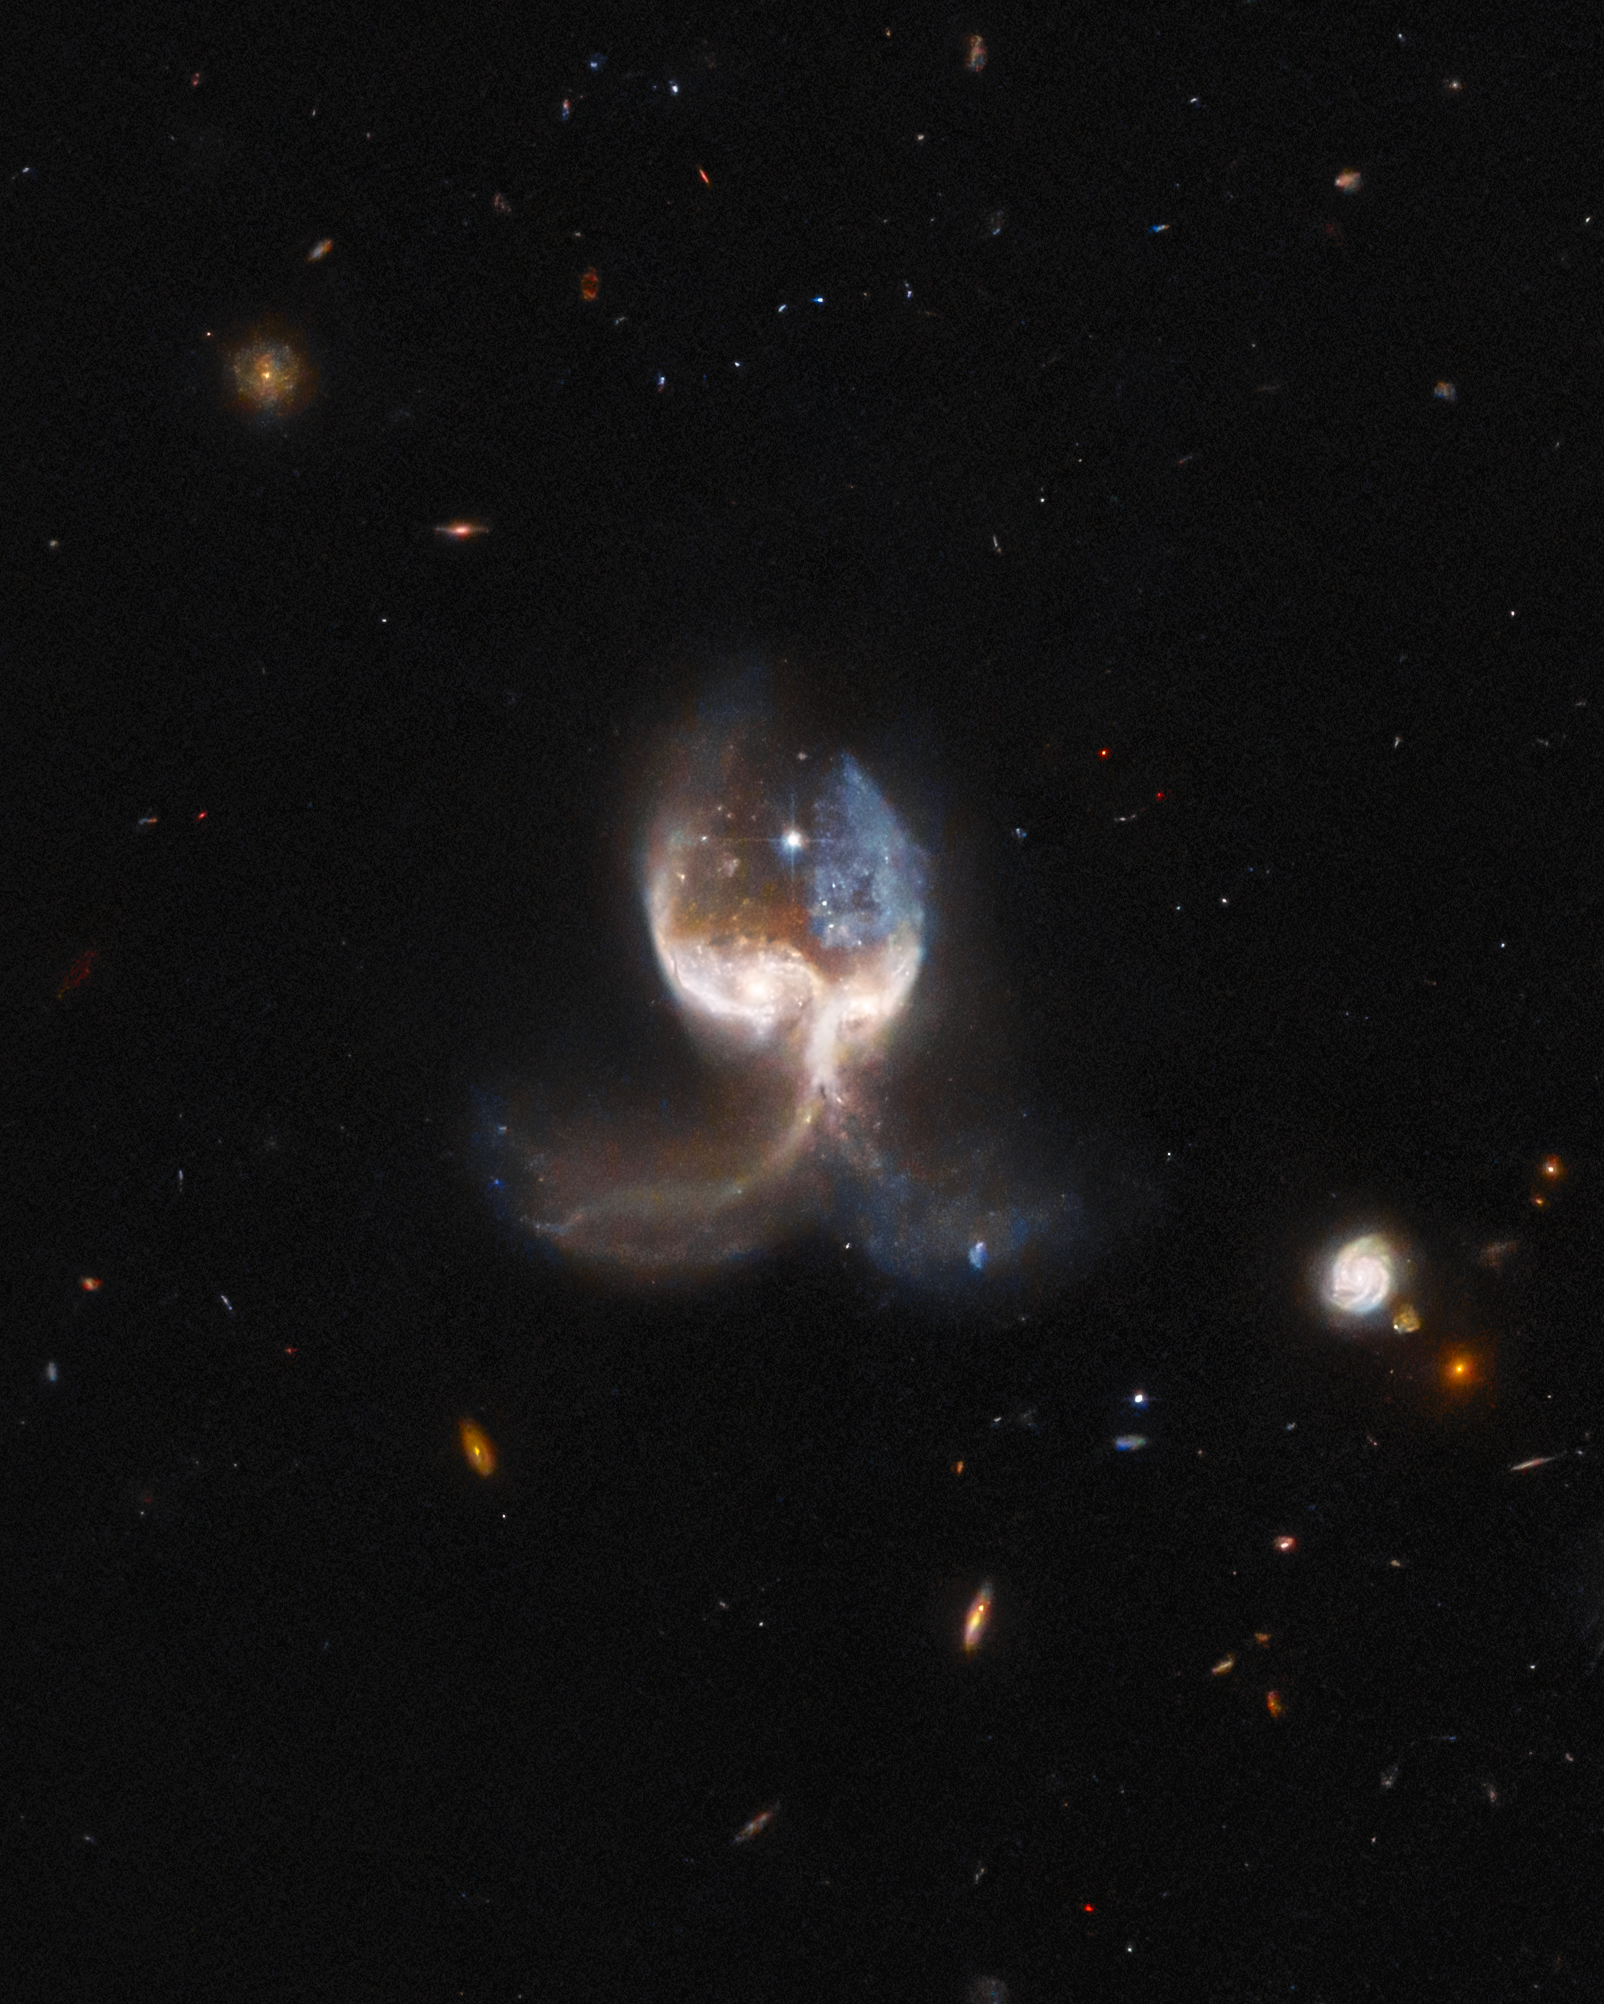

Hubble Inspects a Set of Galactic Wings

Two merging galaxies in the VV689 system — nicknamed the Angel Wing —feature in this image from the NASA/ESA Hubble Space Telescope. In this view, the focus is placed on the system itself, allowing a closer look at it's unique morphology.

Credit: ESA/Hubble & NASA, W. Keel. Acknowledgement: J. Schmidt